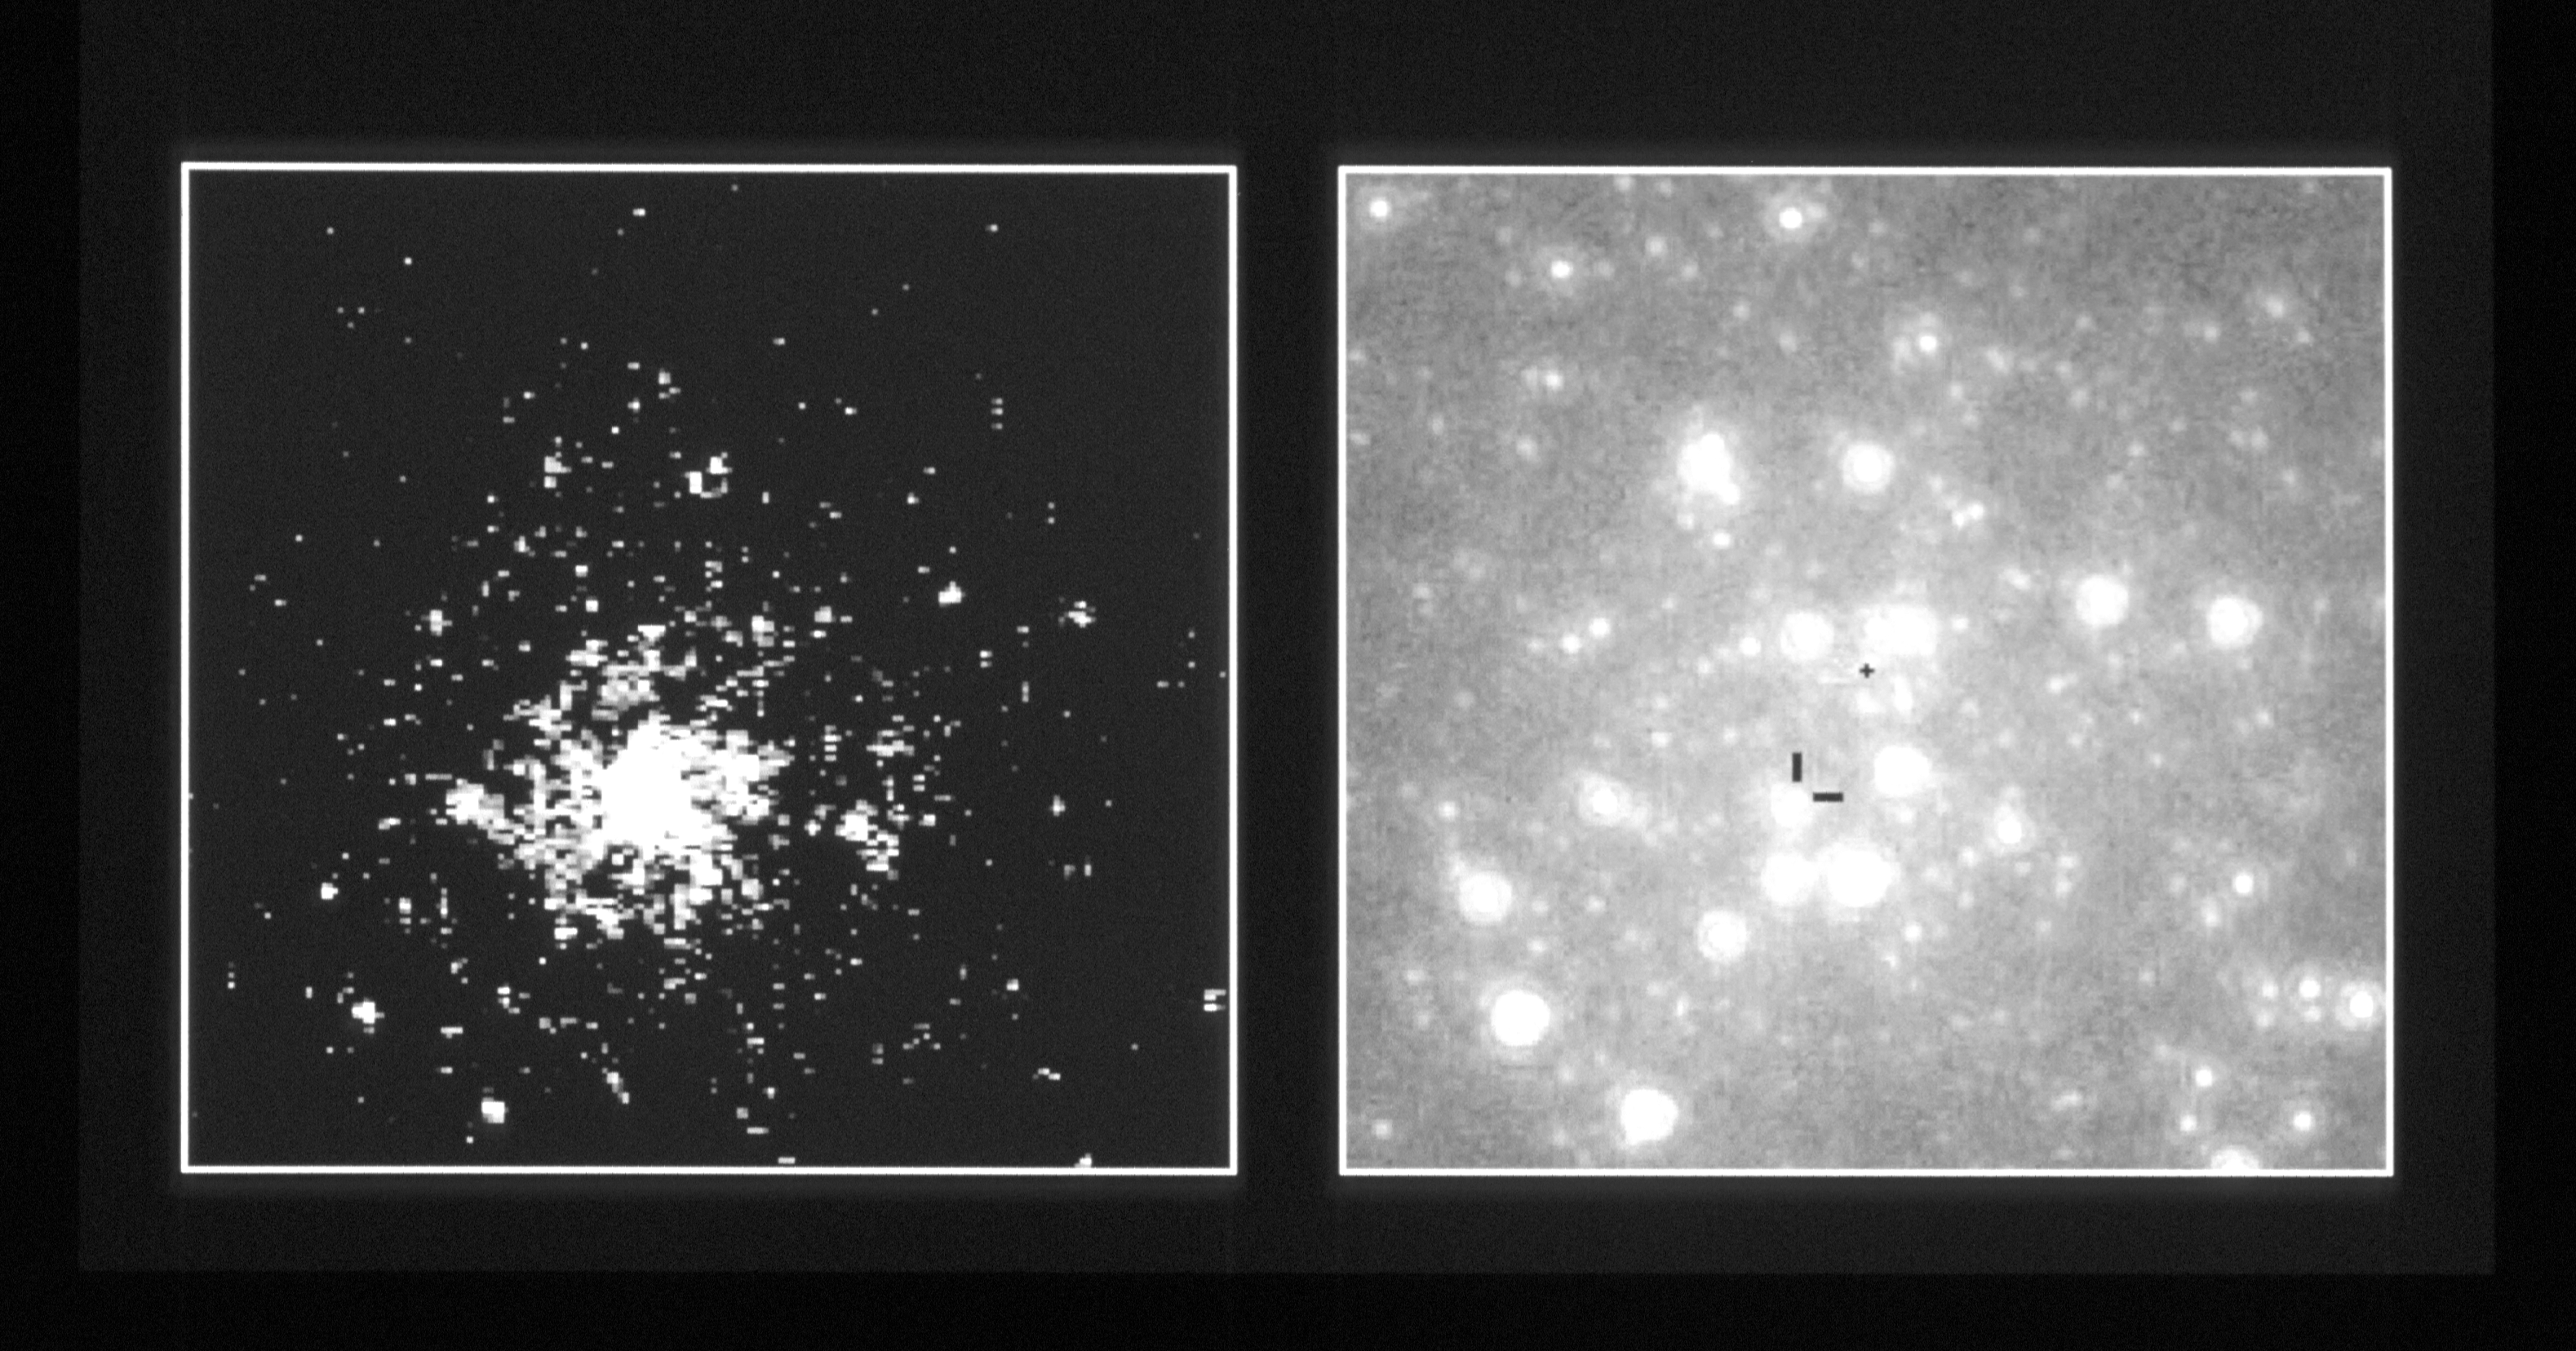

Core of the globular cluster NGC 6624

This is a comparison of pictures of the core of the globular cluster NGC 6624, as imaged with the European Space Agency's Faint Object Camera aboard NASA/ESA Hubble Space Telescope. This comparison image demonstrates that Hubble's high resolution and ultraviolet sensitivity allow astronomers to pick out the faint blue counterpart to an X-ray burster buried in the globular cluster. (An X-ray burster is a class of unusual double star that is a source of violent bursts of X-rays.) HST clearly distinguishes the star from others crammed together in the dense core of the cluster.

The image on the left shows that one star far outshines all others in the cluster's core when viewed at UV wavelengths. Nearly all the fainter stars in this UV image coincide with bright stars in the image on the right, which was taken in visible (blue) light. They are all cool red stars. When the two images are lined up, the UV-bright star coincides with the inconspicuous star that is identified by tic-marks in the right-hand image. It is the bluest (and therefore hottest) star in the cluster and is at the position of an X-ray source known as 4U 1820-30 (first identified as a bright X-ray source in the 1970s during an all sky survey carried out by the Uhuru satellite).

Credit: Ivan King, University of California at Berkeley; and NASA/ESA